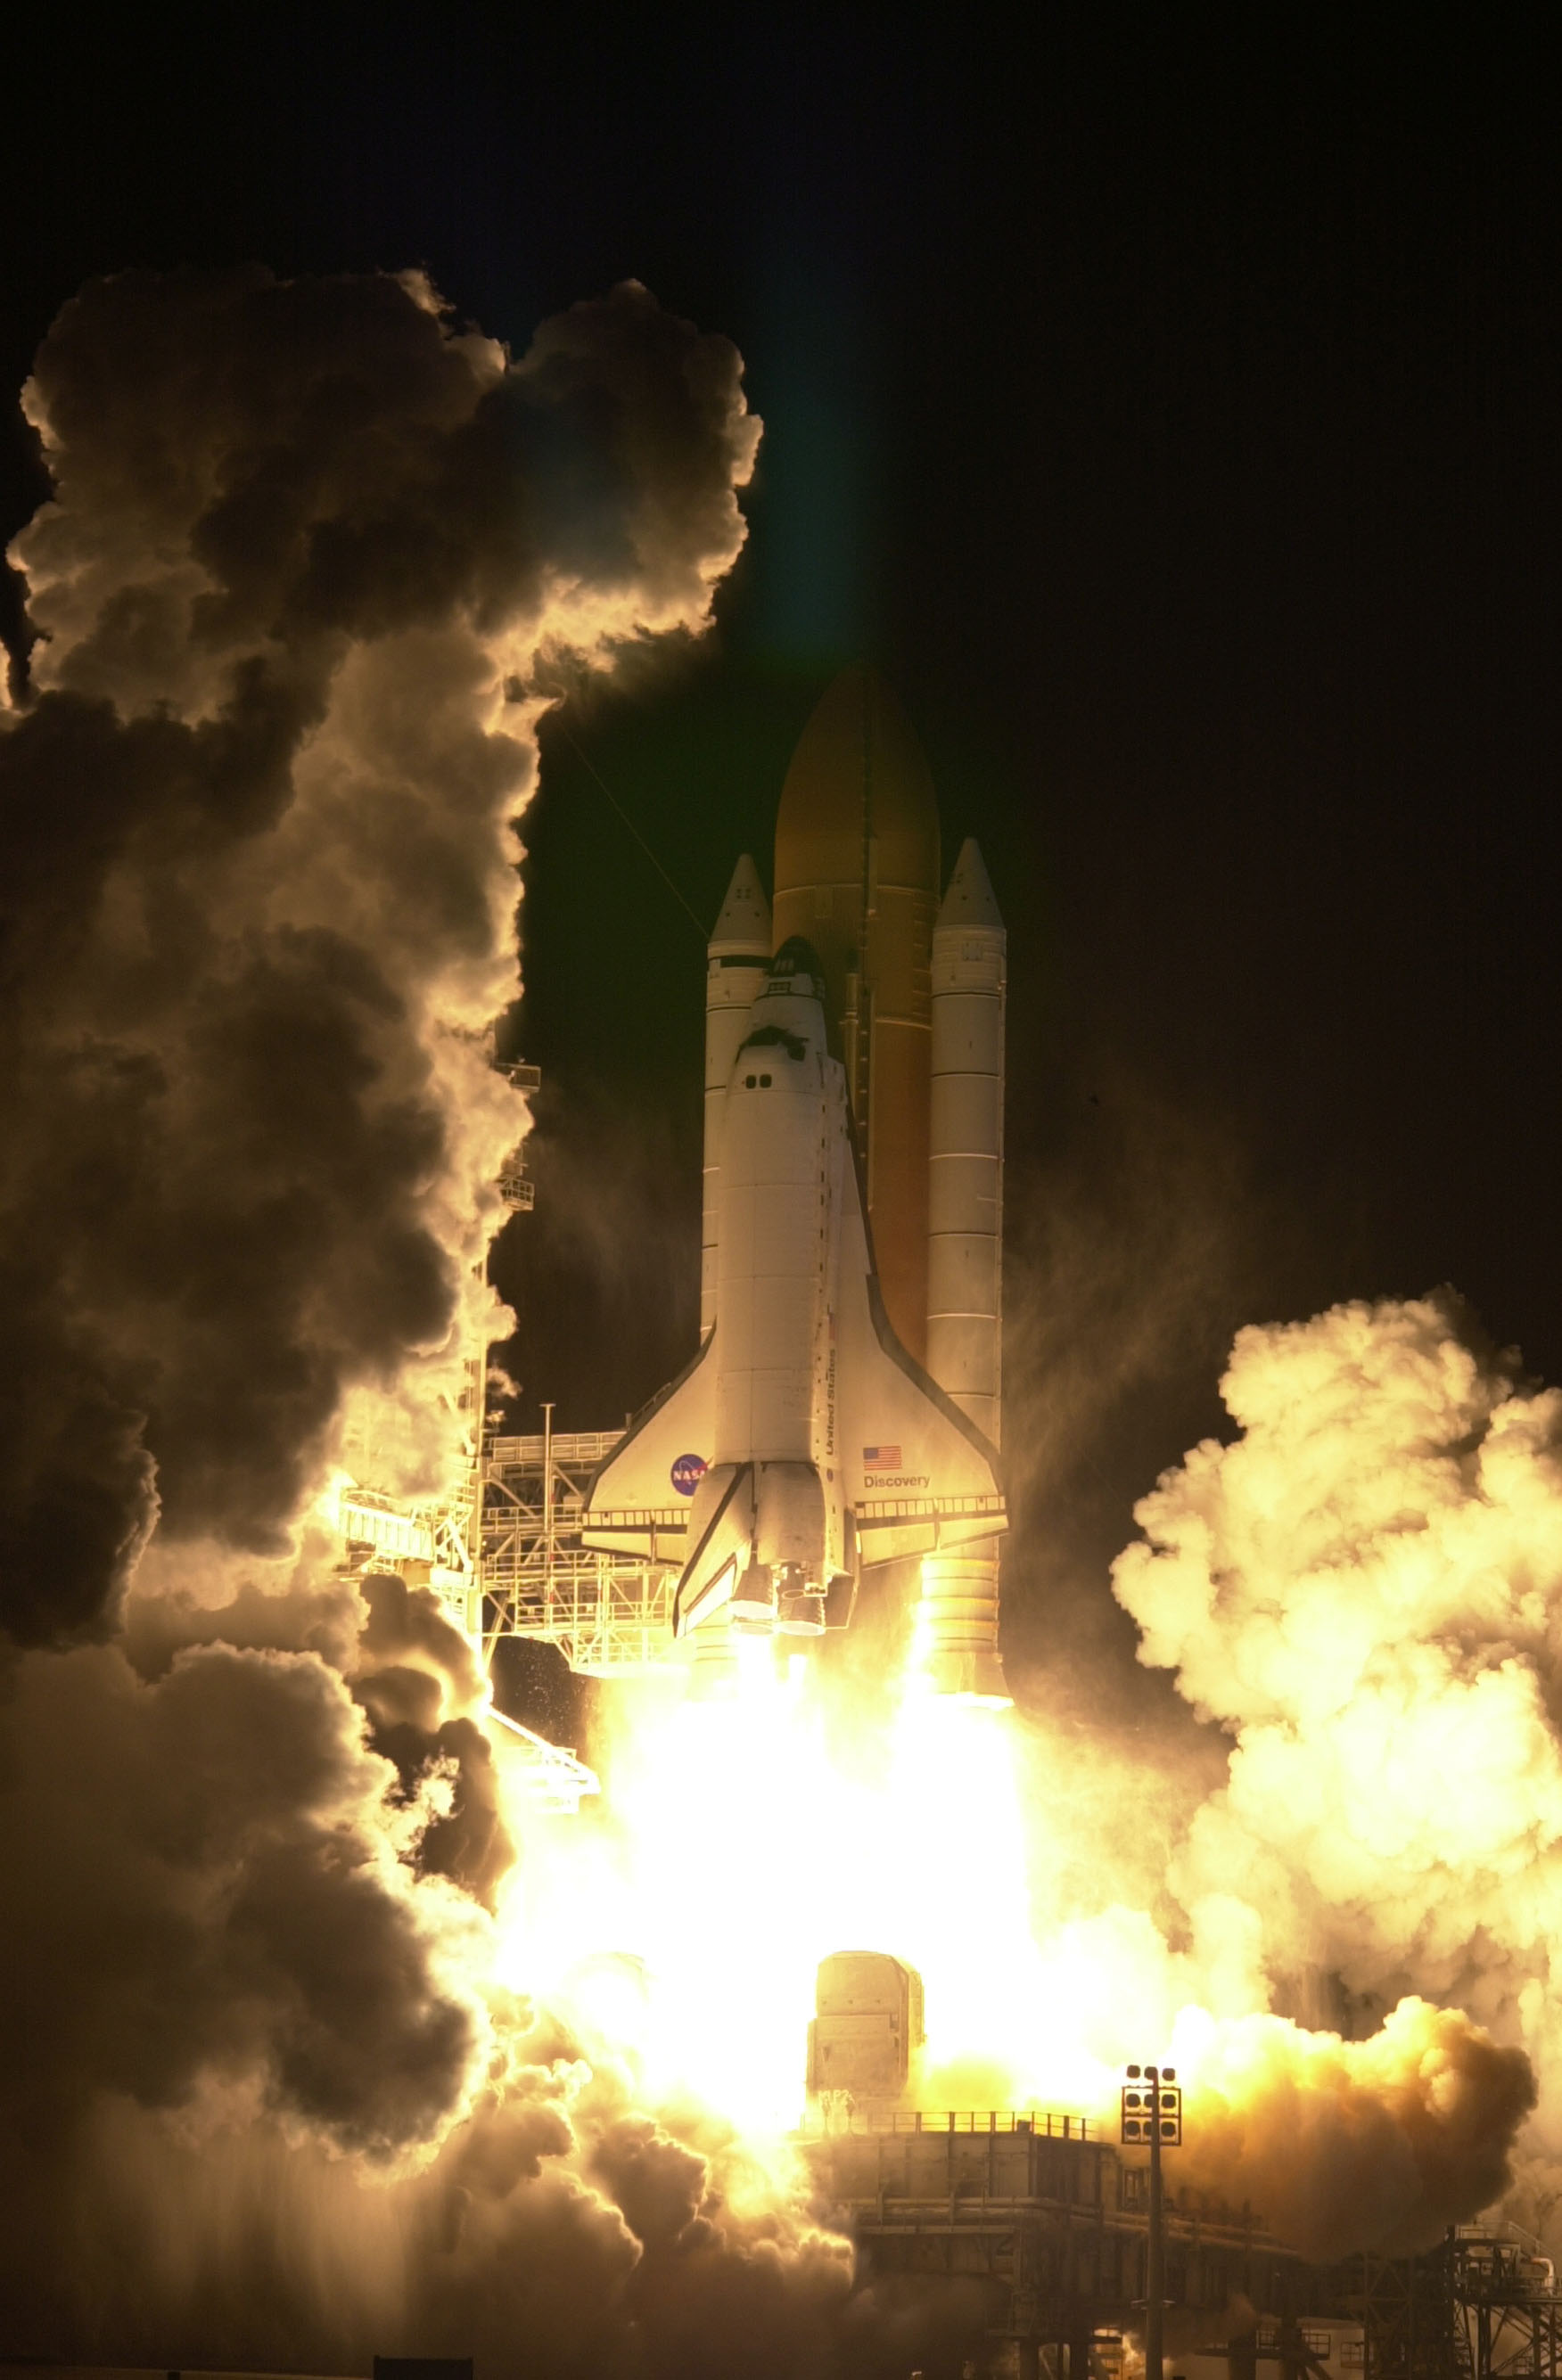

SM3A: Launch

The launch of the Space Shuttle Discovery.

Credit: NASA/ESA